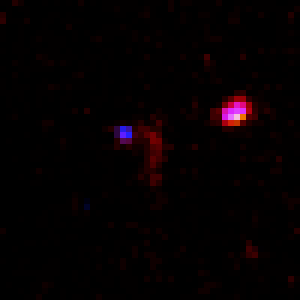

Hubble Deep Field in Infrared

Two close-up NICMOS views of candidate objects which may be over 12 billion light-years away. Each candidate is centered in the frame. The reddish colour may mean all of the starlight has been stretched to infrared wavelengths by the universe's expansion. Alternative explanations are that the objects are closer to us, but the light has been reddened by dust scattering. A new generation of telescopes will be needed to make follow-up observations capable of establishing true distance.

Credit: Rodger I. Thompson (University of Arizona), and NASA/ESA